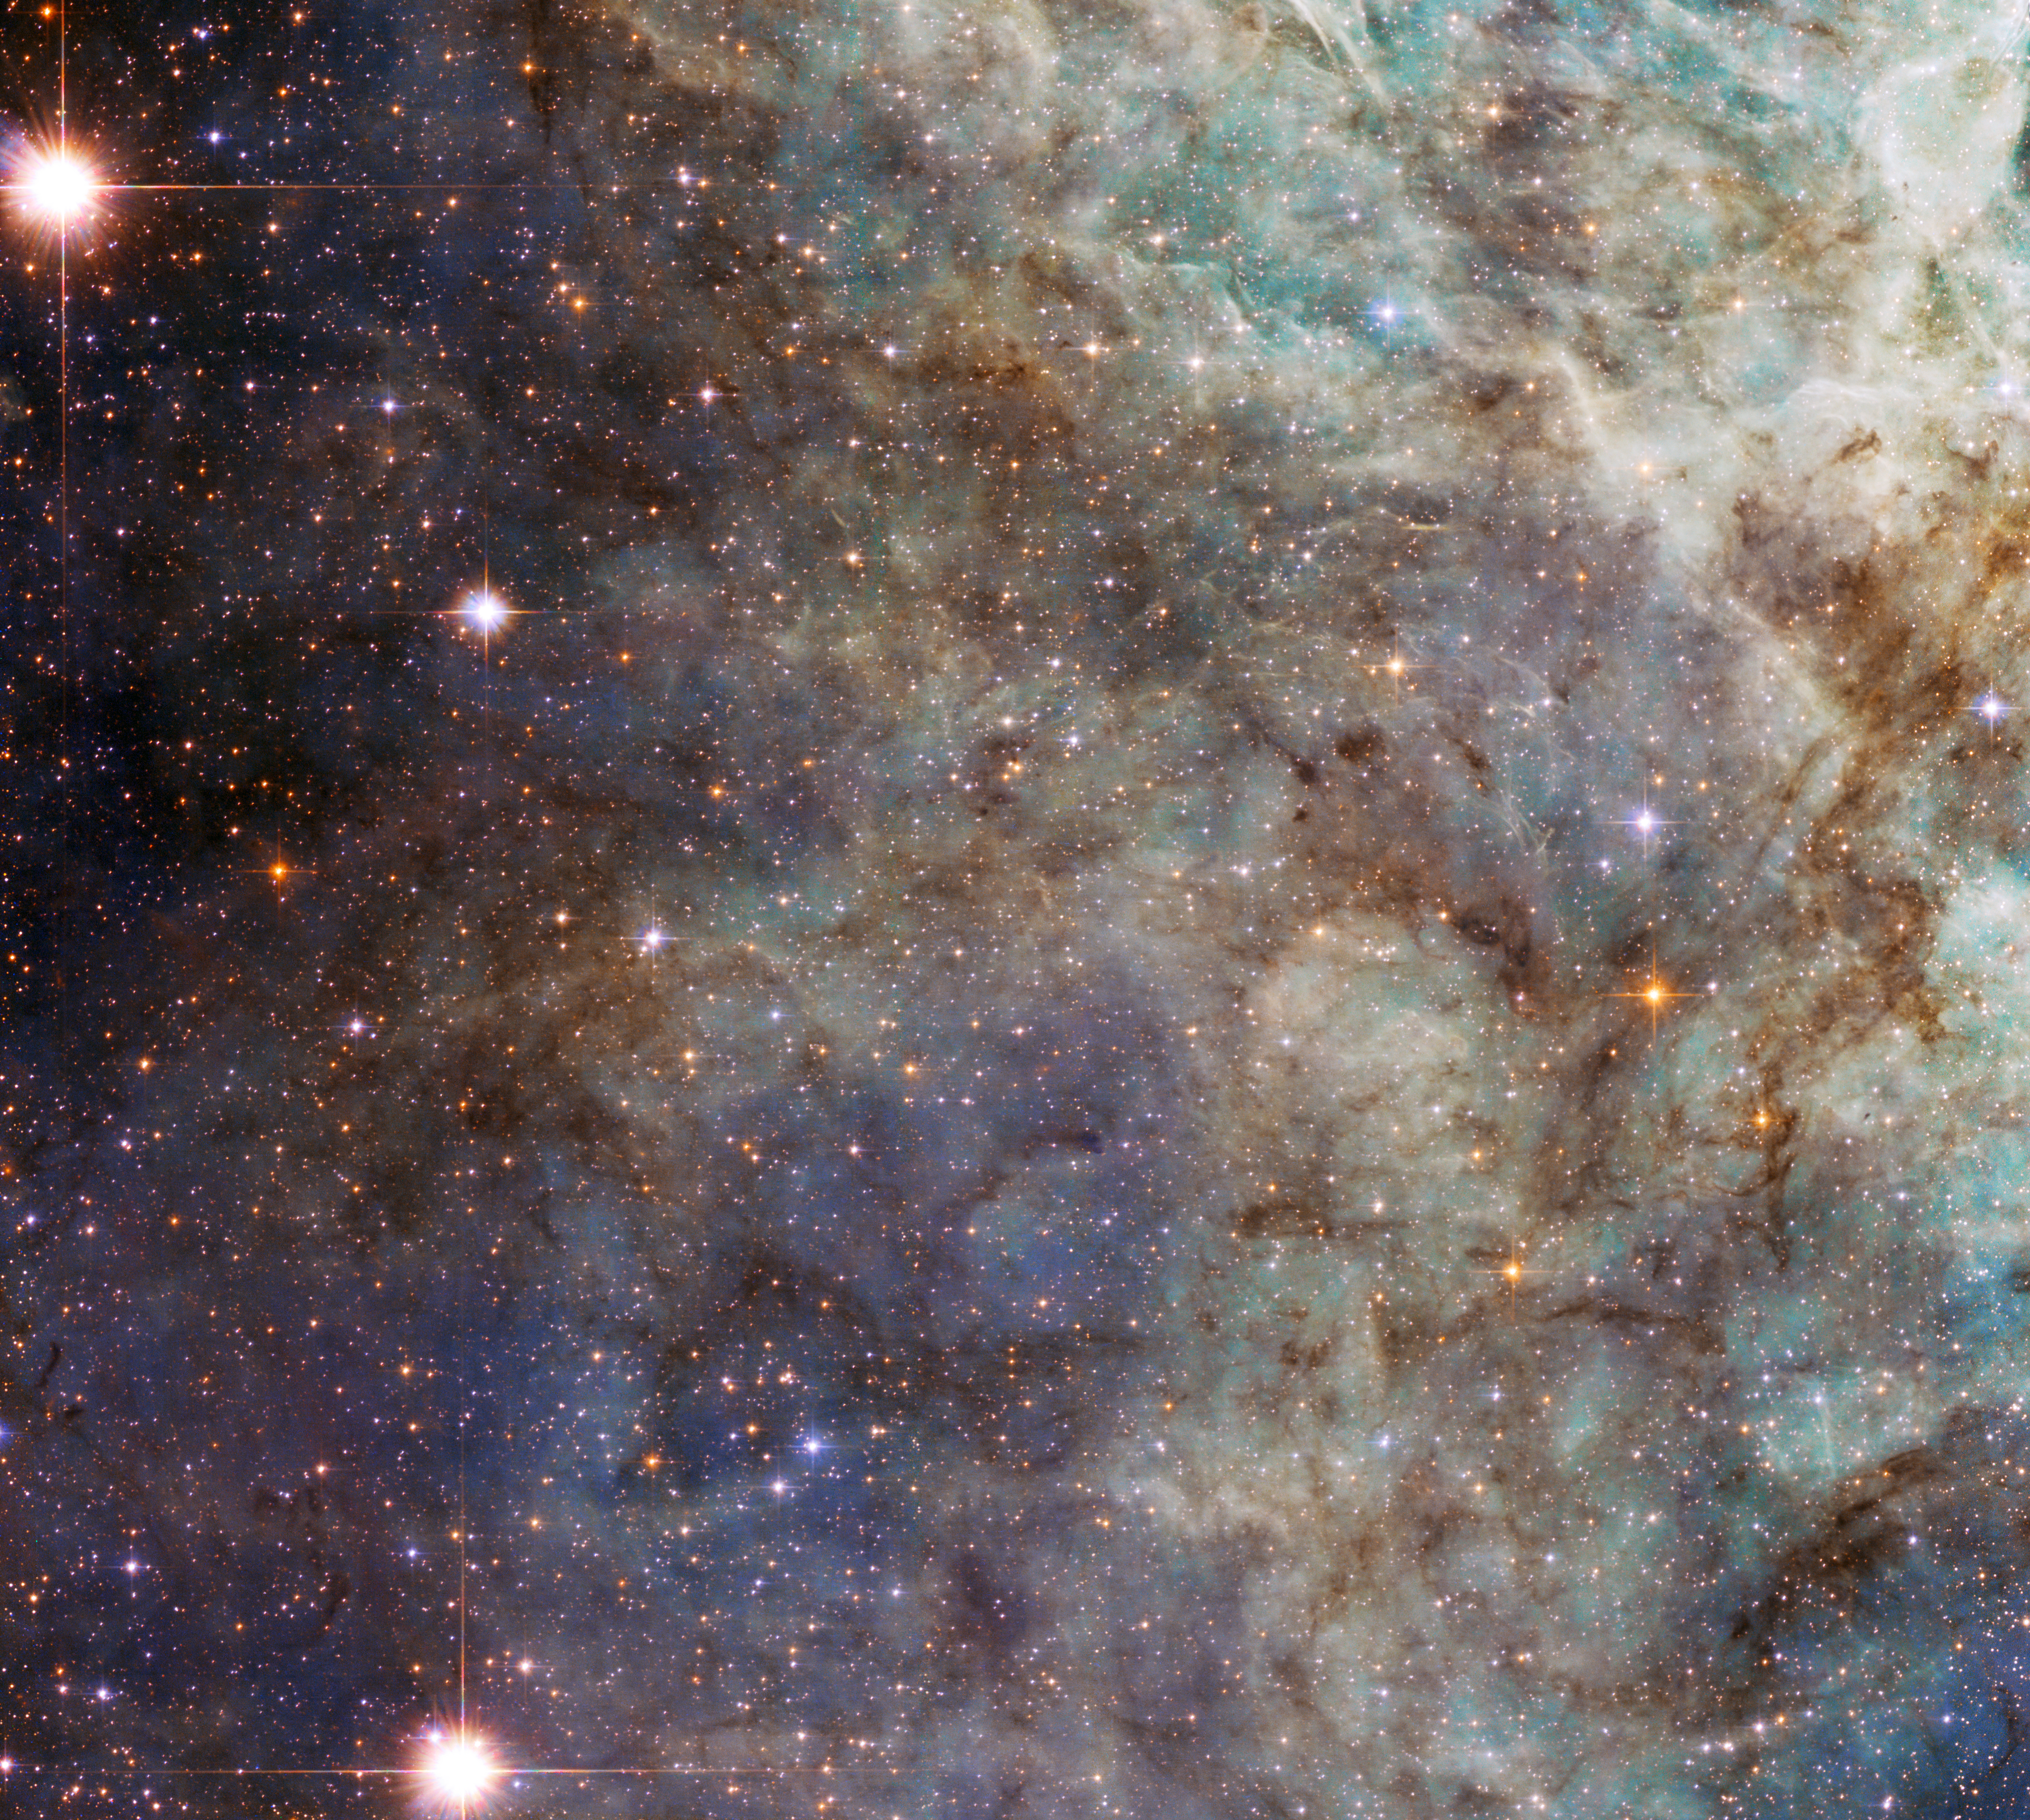

Close encounter with the Tarantula

Turning its 2.4-metre eye to the Tarantula Nebula, the NASA/ESA Hubble Space Telescope has taken this close-up of the outskirts of the main cloud of the Nebula.

The bright wispy structures are the signature of an environment rich in ionised hydrogen gas, called H II by astronomers. In reality these appear red, but the choice of filters and colours of this image, which includes exposures both in visible and infrared light, make the gas appear green.

These regions contain recently formed stars, which emit powerful ultraviolet radiation that ionises the gas around them. These clouds are ephemeral as eventually the stellar winds from the newborn stars and the ionisation process will blow away the clouds, leaving stellar clusters like the Pleiades.

Located in the Large Magellanic Cloud, one of our neighbouring galaxies, and situated at a distance of 170 000 light-years away from Earth, the Tarantula Nebula is the brightest known nebula in the Local Group of galaxies. It is also the largest (around 650 light-years across) and most active star-forming region known in our group of galaxies, containing numerous clouds of dust and gas and two bright star clusters. A recent Hubble image shows a large part of the nebula immediately adjacent to this field of view.

The cluster at the Tarantula nebula’s centre is relatively young and very bright. While it is outside the field of view of this image, the energy from it is responsible for most of the brightness of the Nebula, including the part we see here. The nebula is in fact so luminous that if it were located within 1000 light-years from Earth, it would cast shadows on our planet.

The Tarantula Nebula was host to the closest supernova ever detected since the invention of the telescope, supernova 1987A, which was visible to the naked eye.

The image was produced by Hubble’s Advanced Camera for Surveys, and has a field of view of approximately 3.3 by 3.3 arcminutes.

A version of this image was entered into the Hubble’s Hidden Treasures Image Processing Competition by contestant Judy Schmidt. Hidden Treasures is an initiative to invite astronomy enthusiasts to search the Hubble archive for stunning images that have never been seen by the general public. The competition has now closed and the results will be published soon.

Credit: ESA/Hubble & NASA
Acknowledgement: Judy Schmidt